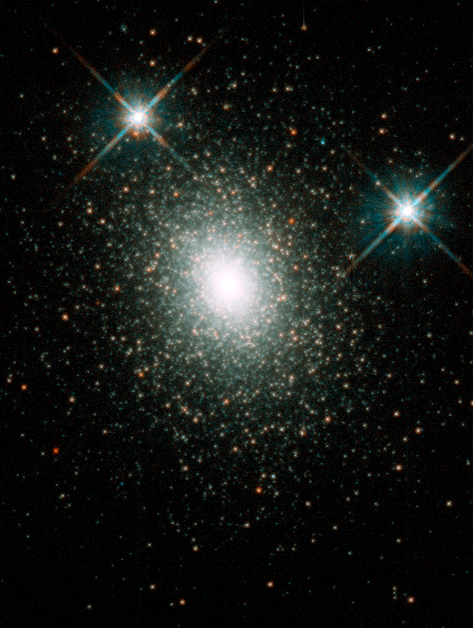

Where Did That Black Hole Come From?

Medium-size black holes actually do exist, according to the latest findings from the NASA/ESA Hubble Space Telescope, but scientists had to look in some unexpected places to find them. The previously undiscovered black holes provide an important link that sheds light on the way in which black holes grow. Even more odd, these new black holes were found in the cores of glittering, 'beehive' swarms of stars called globular star clusters, which orbit our Milky Way and other galaxies.

G1 is a large globular cluster and harbors a hefty black hole, about 20, 000 times more massive than our Sun.

Credit: NASA/ESA and Michael Rich (UCLA)